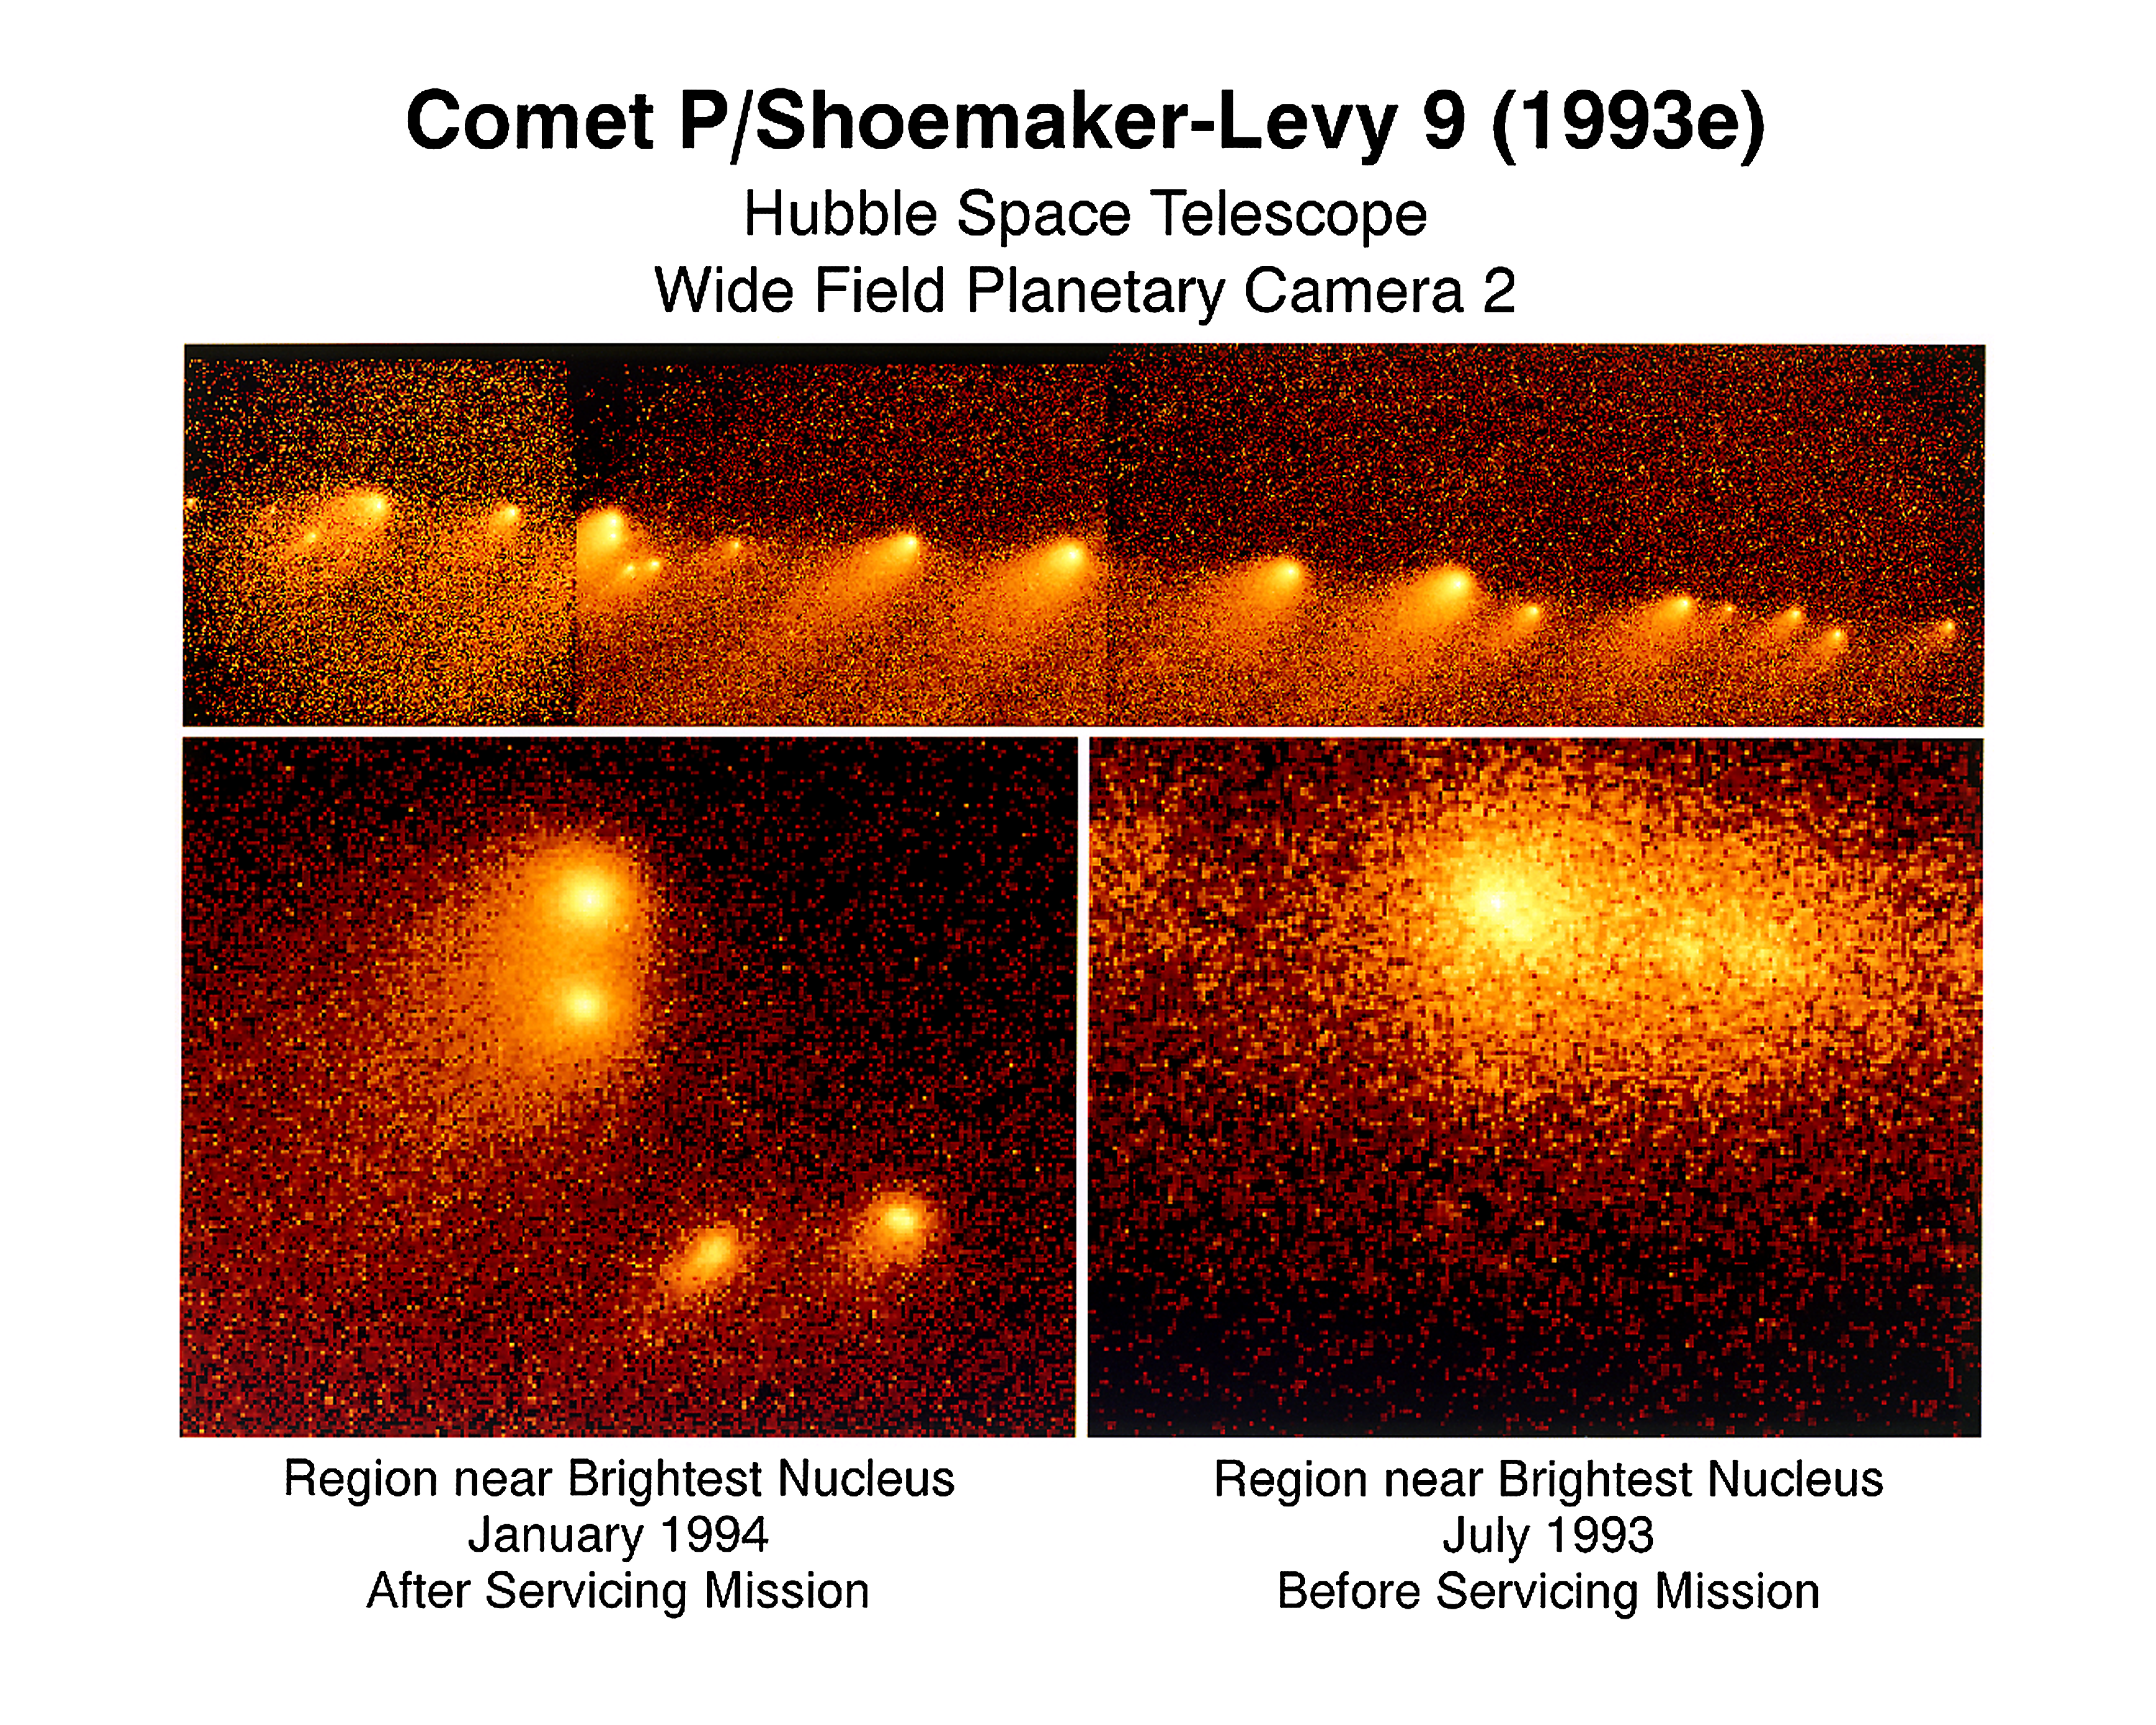

Hubble Space Telescope view of a comet on a collision course with Jupiter

These images of Comet P/Shoemaker- Levy 9 (1993e) fragments were made by NASA/ESA Hubble Space Telescope (HST). The cometary chunks are expected to plunge into Jupiters atmosphere in July 1994. The comet was torn into numerous pieces by the massive planet's gravitational pull as it passed by Jupiter in summer 1992.

The fragments are due to hit Jupiter in a 5-1/2 day period centered on July 19, possibly producing spectacular results depending on the size of the pieces. The fragments are expected to impact with an energy release many times that of nuclear warheads.

Credit: Dr. H.A Weaver & T.E.. Smith STScI. NASA/ESA